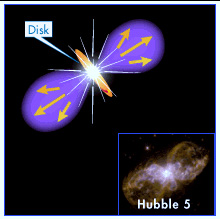

Hubble 5 illustration

The end of a Sun-like star's life was once thought to be simple: the star gracefully casts off a shell of glowing gas and then settles into a long retirement as a burned-out white dwarf, as shown in this illustration.

Credit: NASA & ESA